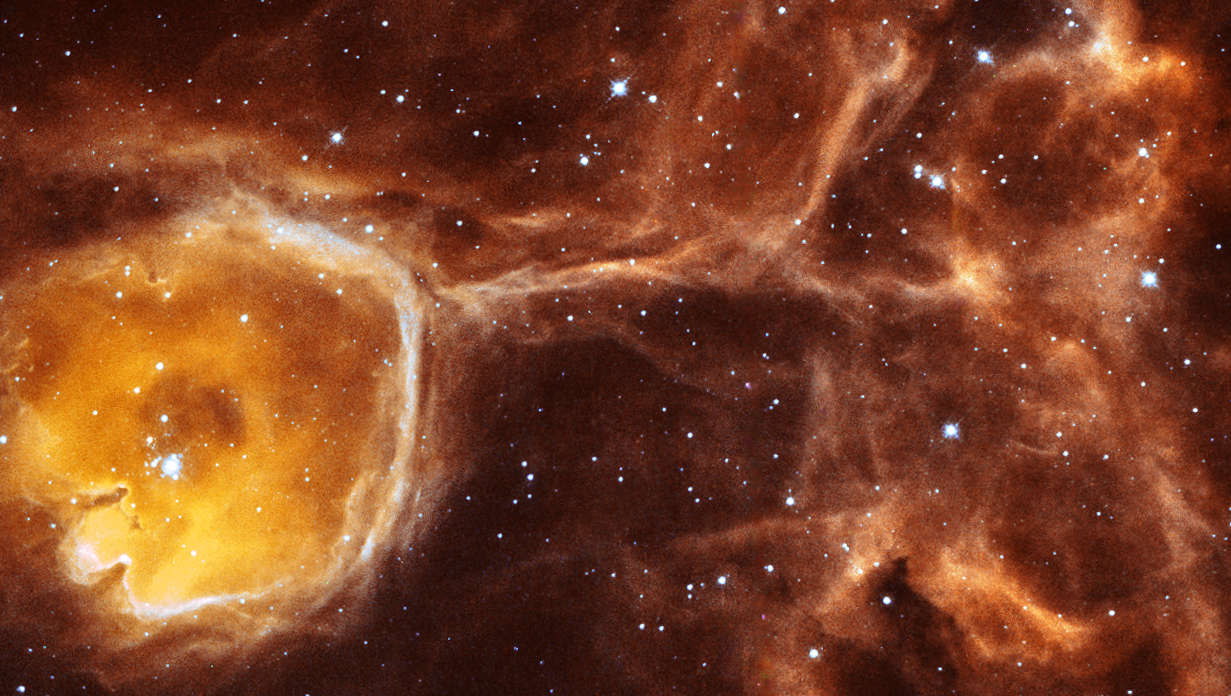

Hubble peers inside a celestial geode

In this unusual image, the NASA/ESA Hubble Space Telescope captures a rare view of the celestial equivalent of a geode - a gas cavity carved by the stellar wind and intense ultraviolet radiation from a young hot star.

Real geodes are handball-sized, hollow rocks that start out as bubbles in volcanic or sedimentary rock. Only when these inconspicuous round rocks are split in half by a geologist, do we get a chance to appreciate the inside of the rock cavity that is lined with crystals. In the case of Hubble's 35 light-year diameter "celestial geode" the transparency of its bubble-like cavity of interstellar gas and dust reveals the treasures of its interior.

Credit: ESA/NASA, Yäel Nazé (University of Liège, Belgium) and You-Hua Chu (University of Illinois, Urbana, USA)